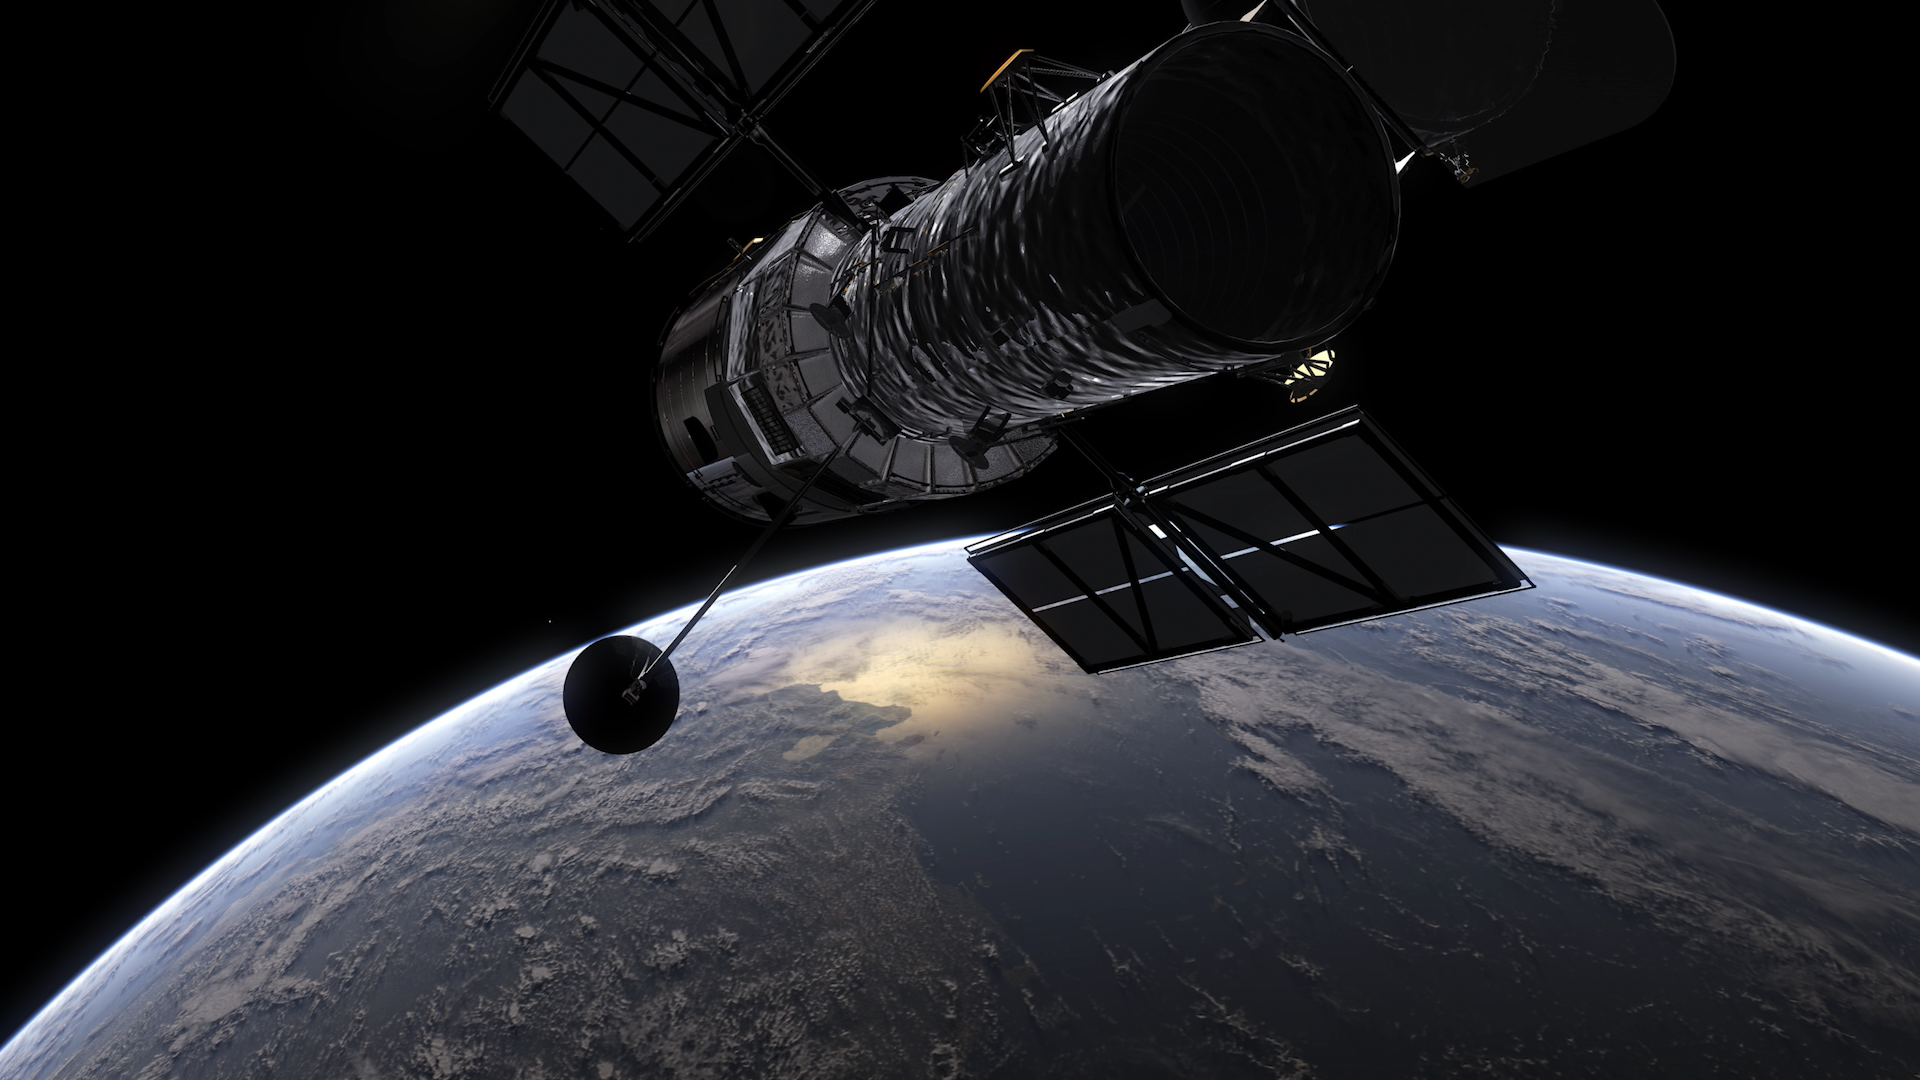

Screenshot of Hubblecast 128

Screenshot from Hubblecast 128: Hubble’s Collection of Anniversary Images.

Credit: ESA/Hubble